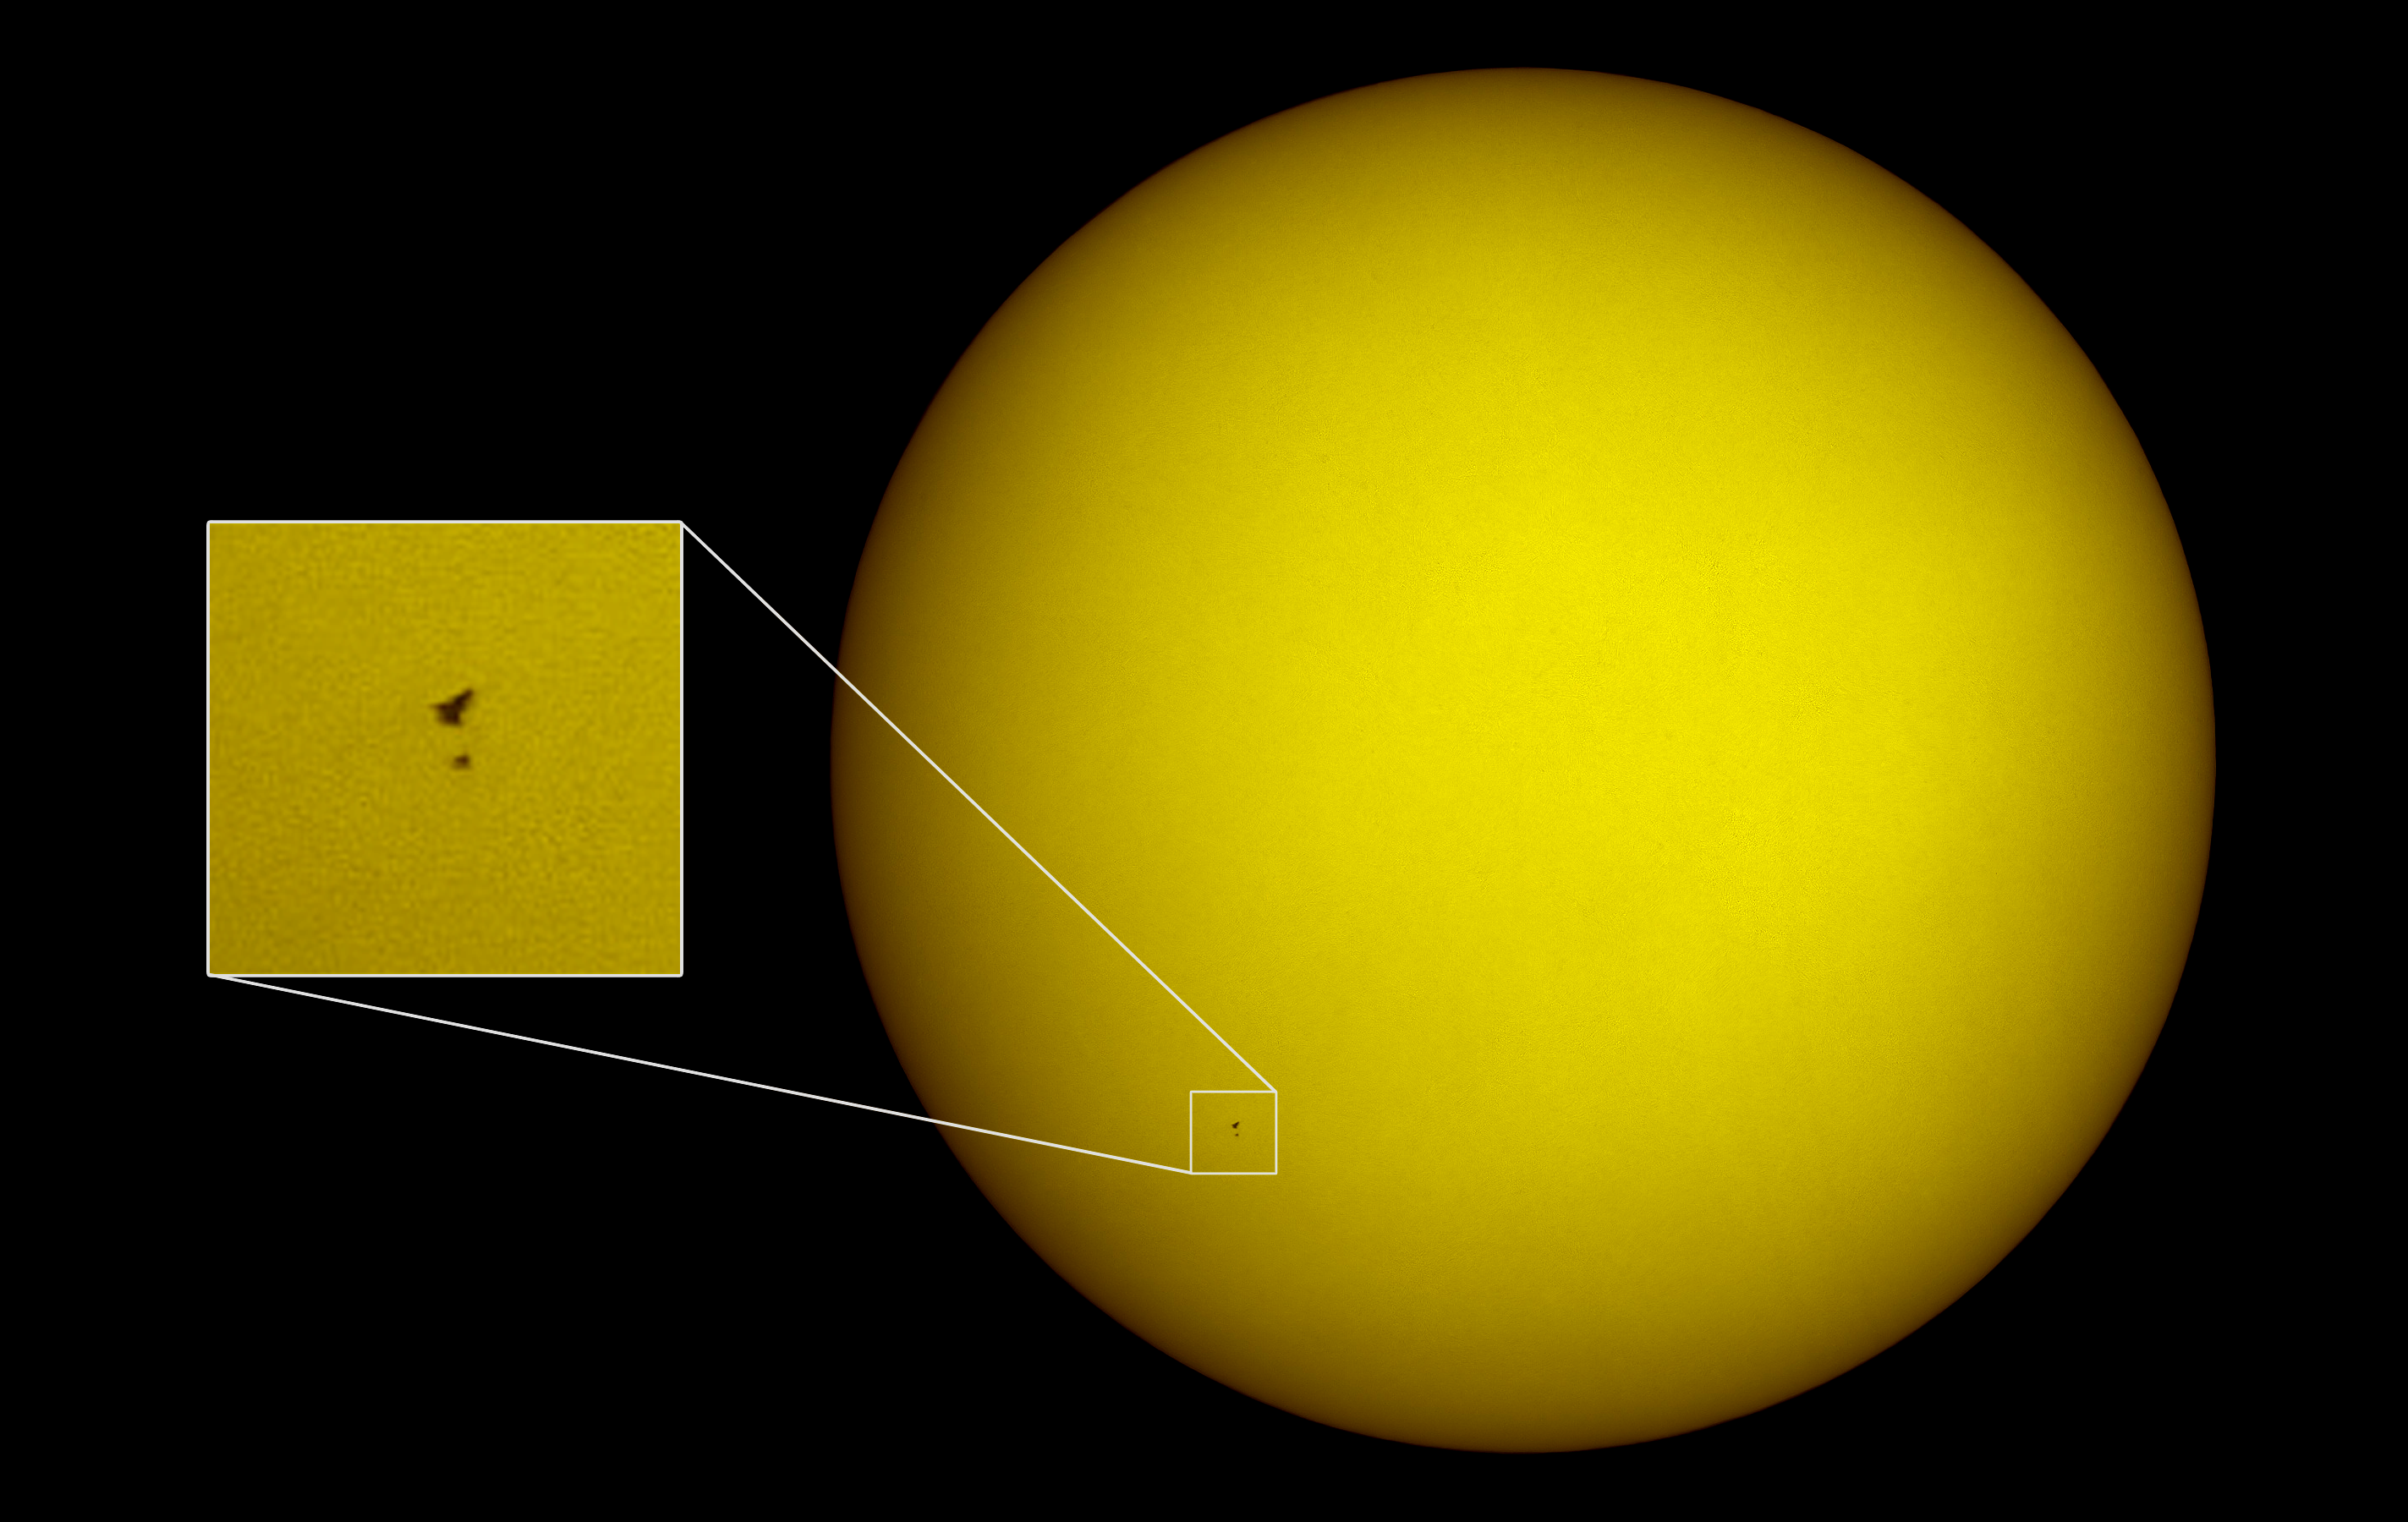

Hubble on the face of the Sun

This remarkable and unique image of the space shuttle Atlantis and the NASA/ESA Hubble Space Telescope silhouetted against the dazzling disc of the Sun was captured from the ground near the start of the Servicing Mission 4 on 13 May 2009. The picture was taken from Florida, 100 kilometres south of the Kennedy Space Center as Hubble was about to be grappled by the Shuttle’s robot arm. The Shuttle and Hubble appear as small black specks at the lower left, the Shuttle is the larger of the two. The solar disc was unusually quiet in a deep solar minimum and there are no sunspots visible.

The image was acquired with a 130 mm aperture refracting telescope equipped with a special solar prism to reduce the intensity along with a standard digital camera. The transit across the disc of the Sun took less than one second and the path across the ground where it could be observed was only a few kilometres wide — giving some idea of the extraordinarily careful planning needed.

Credit: Thierry Legault/NASA (www.astrophoto.fr)